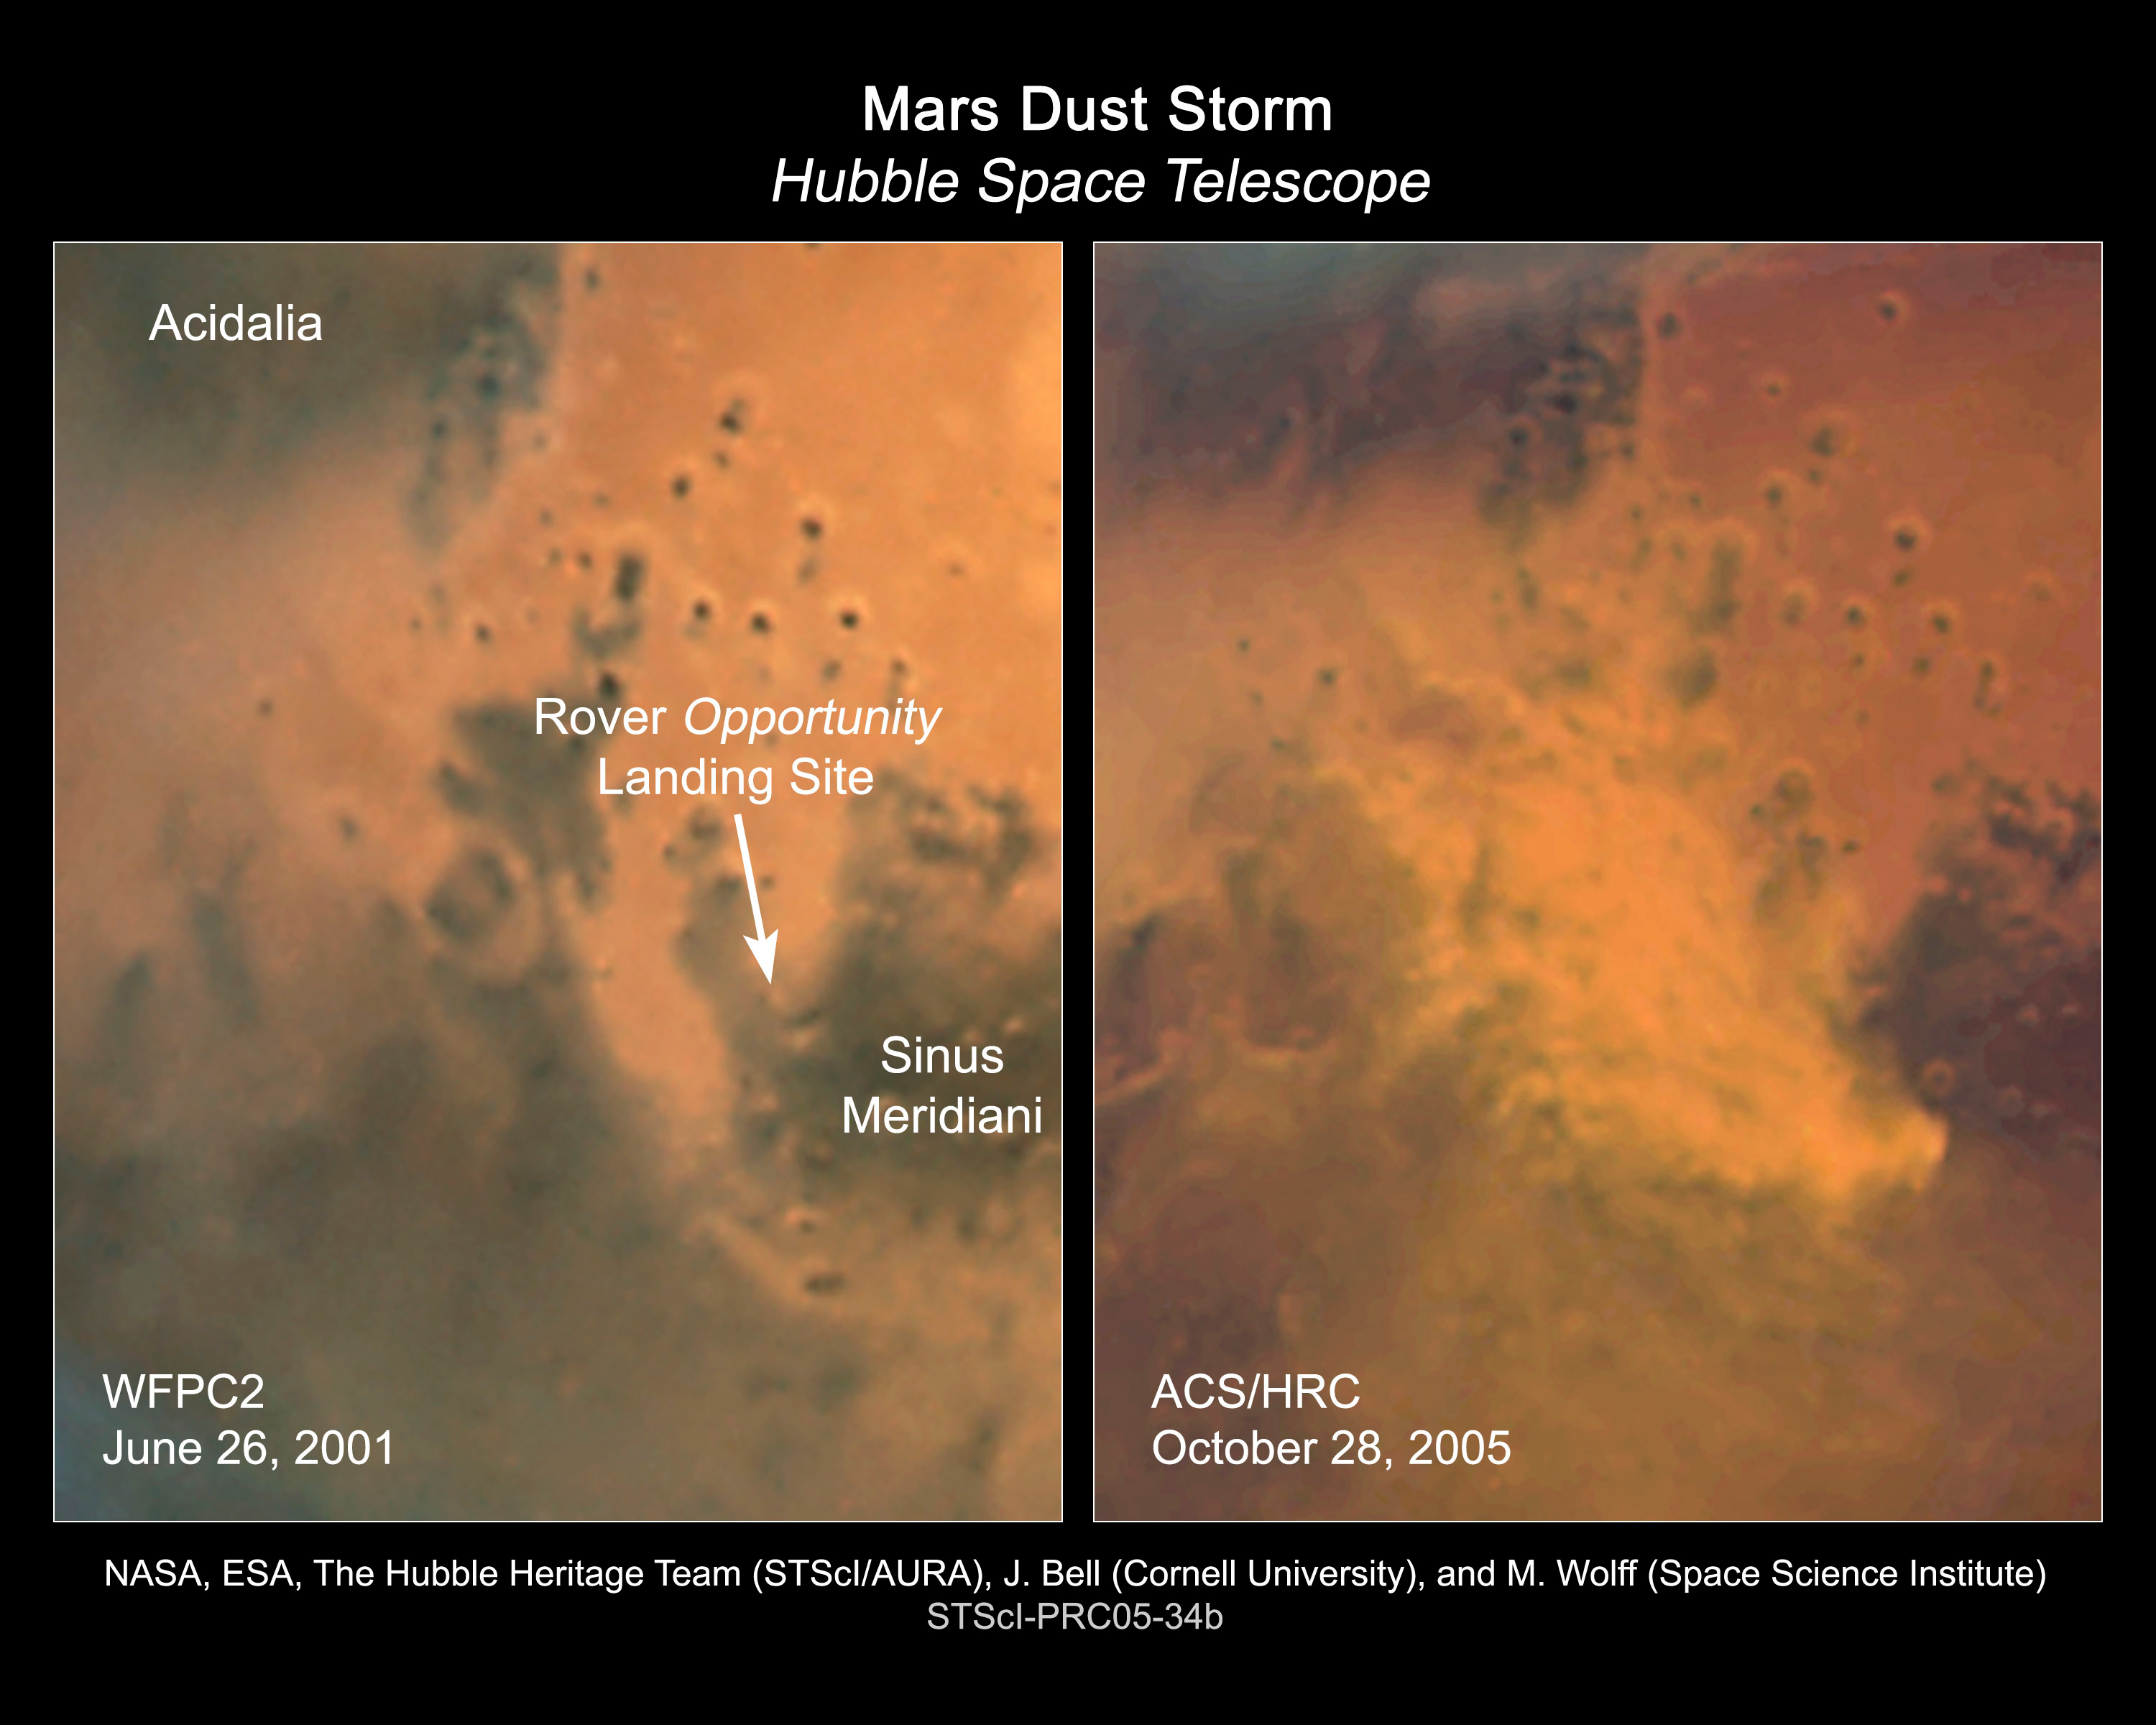

Dust storm on Mars

Hubble images of the Sinus Meridiani region taken on October 28, 2005 show evidence of a regional dust storm. A comparable Hubble image taken on June 26, 2001 of the same region shows a storm-free environment. The dust storm, which is about 930 miles (1500 km) long, is about the size of the states of Texas, Oklahoma, and New Mexico combined. Ground-based amateur telescopes have been watching the storm grow and evolve.

Credit: NASA, ESA, The Hubble Heritage Team (STScI/AURA), J. Bell (Cornell University) and M. Wolff (Space Science Institute)